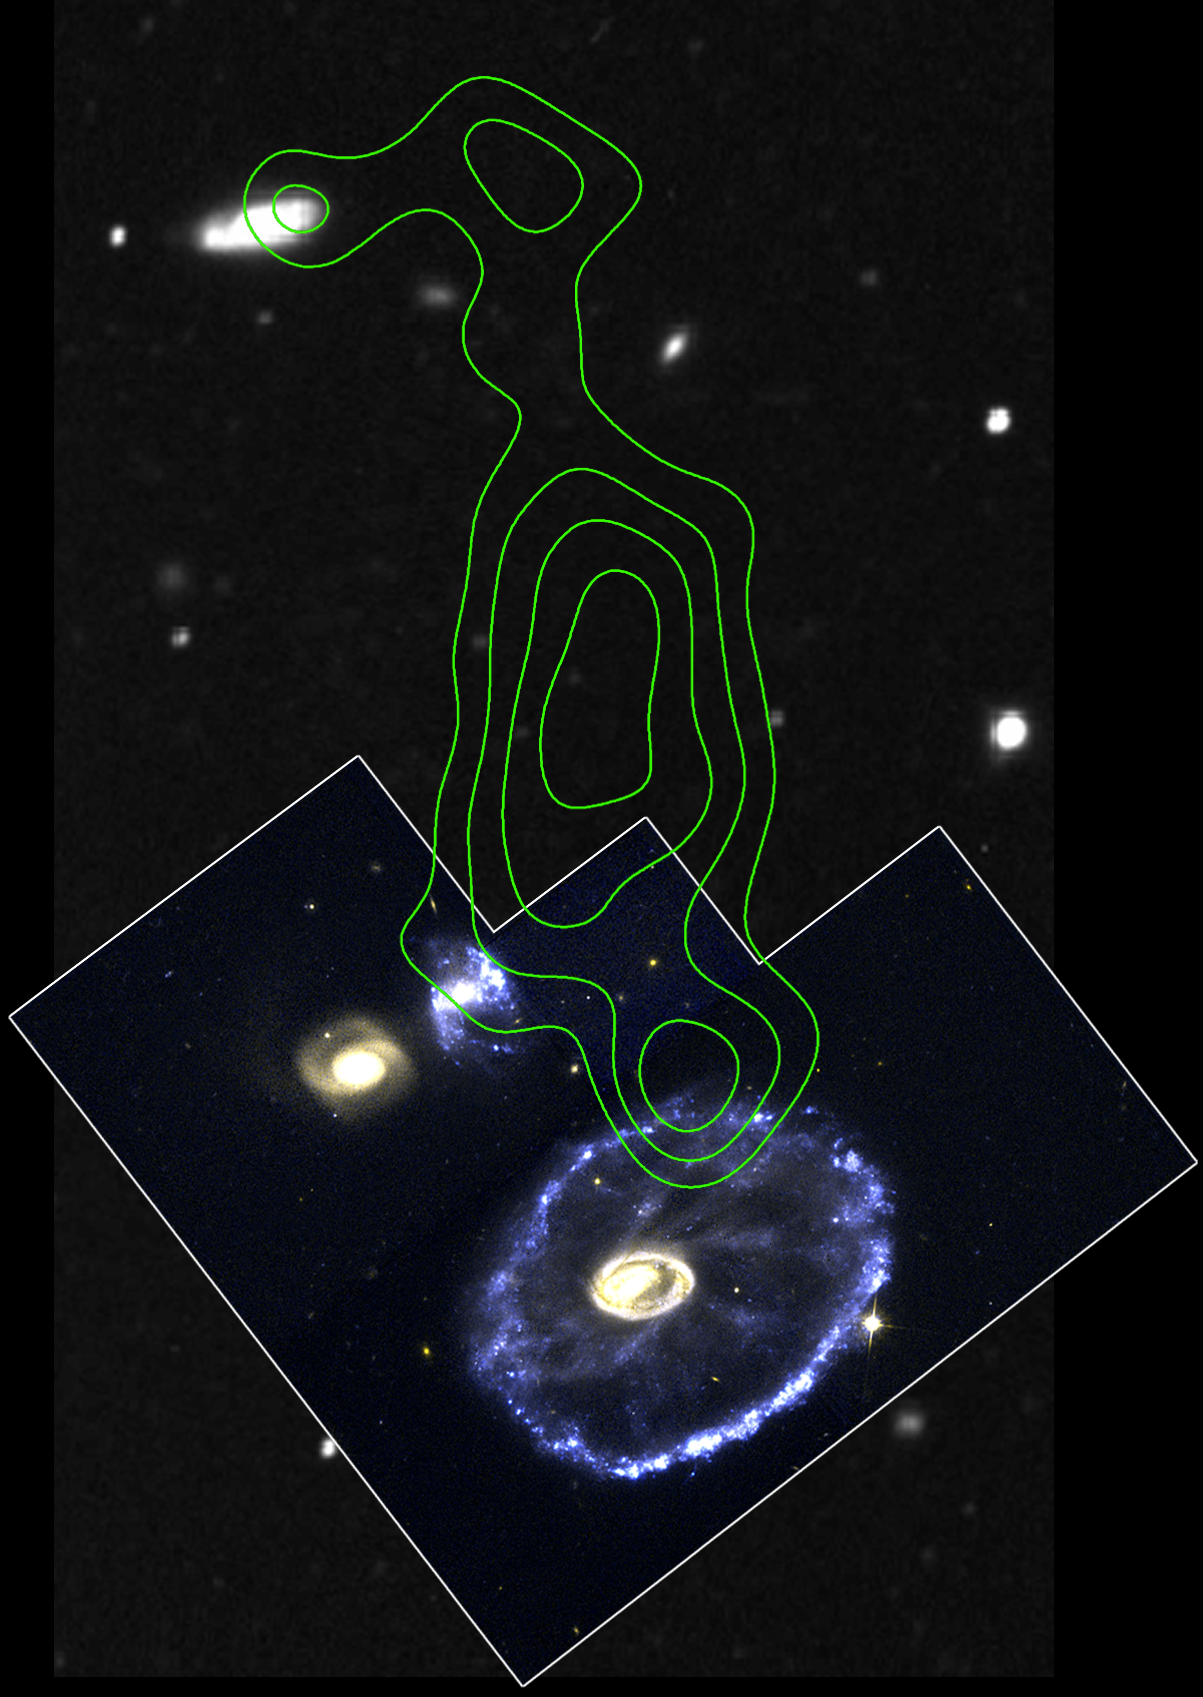

Cartwheel Galaxy Region

The Cartwheel is part of a group of four galaxies, as shown in this collage of images from ground-based optical and radio telescopes and the Hubble Space Telescope's Wide Field and Planetary Camera 2.

Located 500 million light-years away in the constellation Sculptor, the galaxy (located near the bottom right corner) looks like a wagon wheel. The galaxy's nucleus is the bright object in the center; the spokes are wisps of material connecting the nucleus to the outer ring of young stars. The galaxy's unusual configuration was created by a nearly head-on collision with a smaller galaxy about 200 million years ago.

Credit: Curt Struck and Philip Appleton (Iowa State University), Kirk Borne (Hughes STX Corporation), and Ray Lucas ( Space Telescope Science Institute), Jim Higdon (Australia Telescope National Facility's Paul Wild Observatory), Victor Blanco (Cerro Tololo)